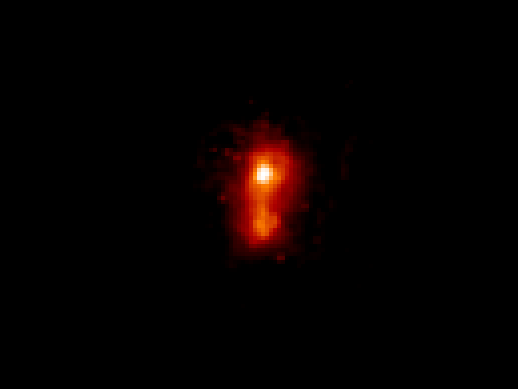

Hubble Simulation of I Zw 18

This image was created by modifying the original Hubble photo of I Zw 18. The image shows how the galaxy would look if it appeared at a distance of 300 million light-years.

The simulation shows that we see far less of the galaxy as the fainter stars cannot be seen at large distances. It is therefore believed that astronomers only see the 'tip of the iceberg' when they point their large telescopes at the heavens.

Credit: A. Fruchter and Z. Levay (STScI)